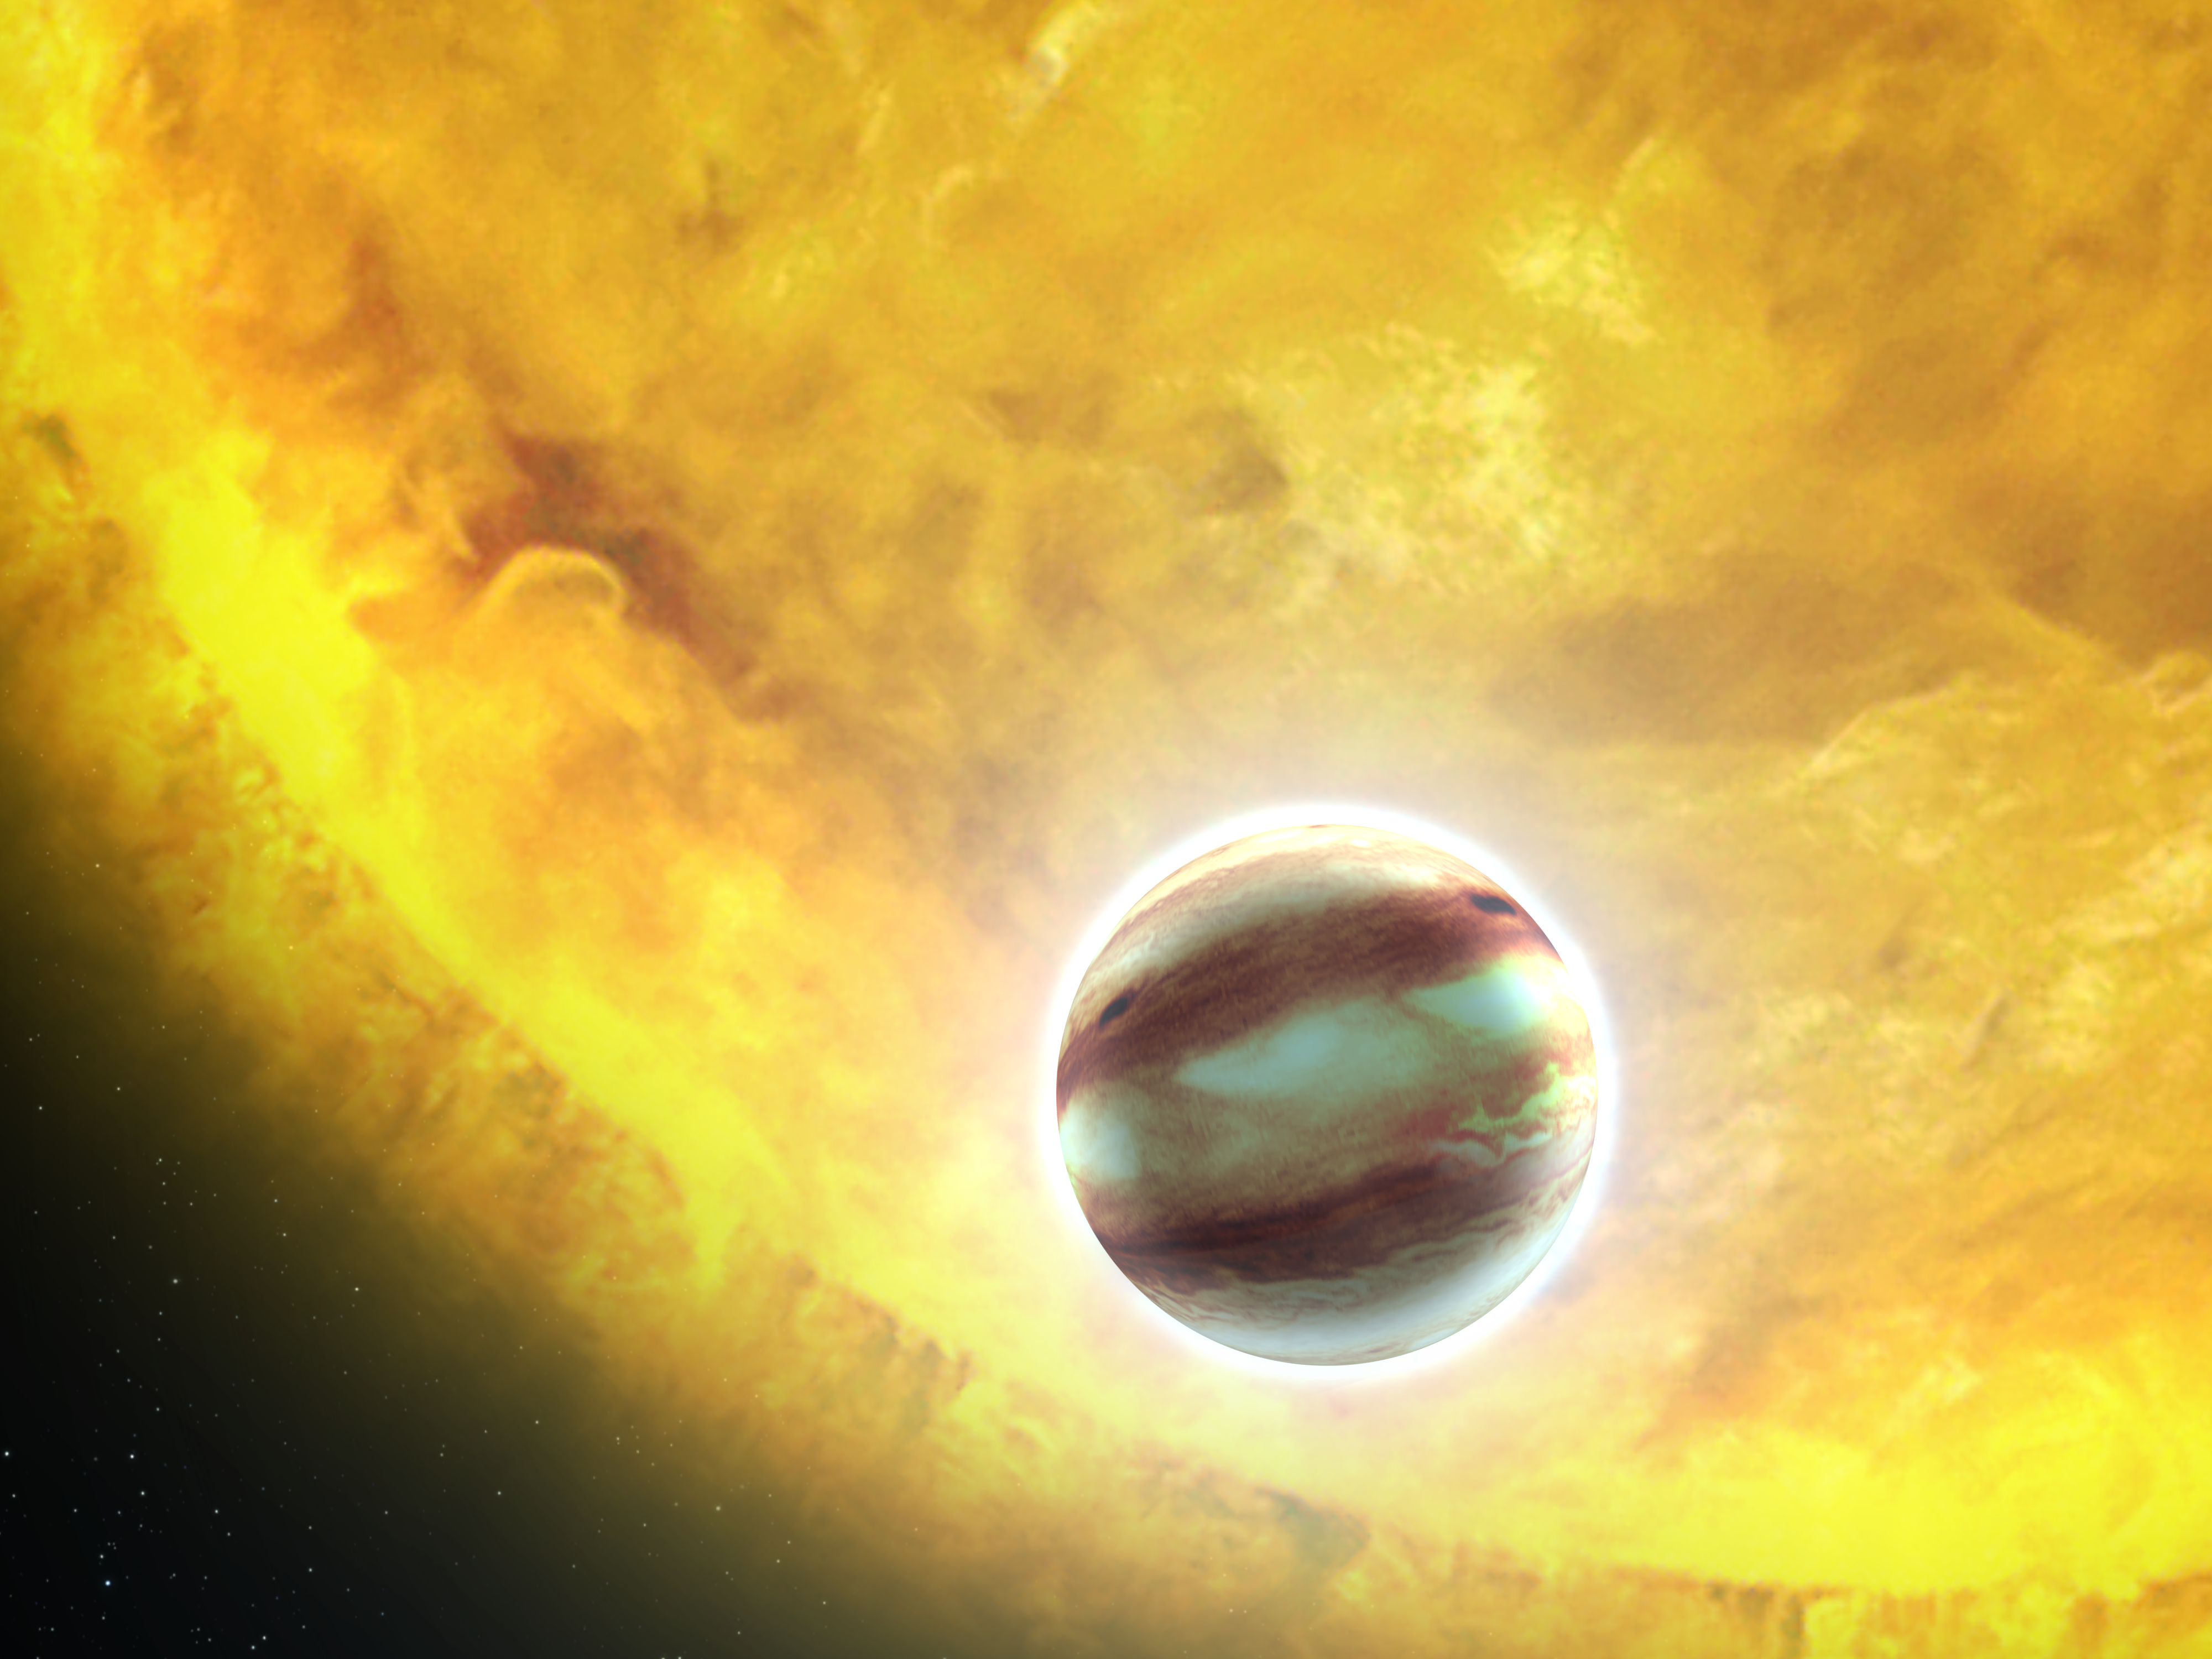

Transiting exoplanet HAT-P-7b (artist's impression)

This is an artist’s concept of the extrasolar planet HAT-P-7b. It is a “hot Jupiter” class planet orbiting a star that is much hotter than our Sun. For its millionth observation, the NASA/ESA Hubble Space Telescope’s was trained on this planet to look for the presence of water vapour and to study the planet’s atmospheric structure via spectroscopy. Planets with orbits inclined nearly edge-on to Earth can be observed passing in front of and behind their stars. This allows for the planetary atmospheres to be studied by Hubble’s spectrometers. Hubble’s unique capabilities allow astronomers to do follow-up observations of exoplanets to characterise the composition and structure of their atmospheres.

Credit: NASA, ESA and G. Bacon (STScI)